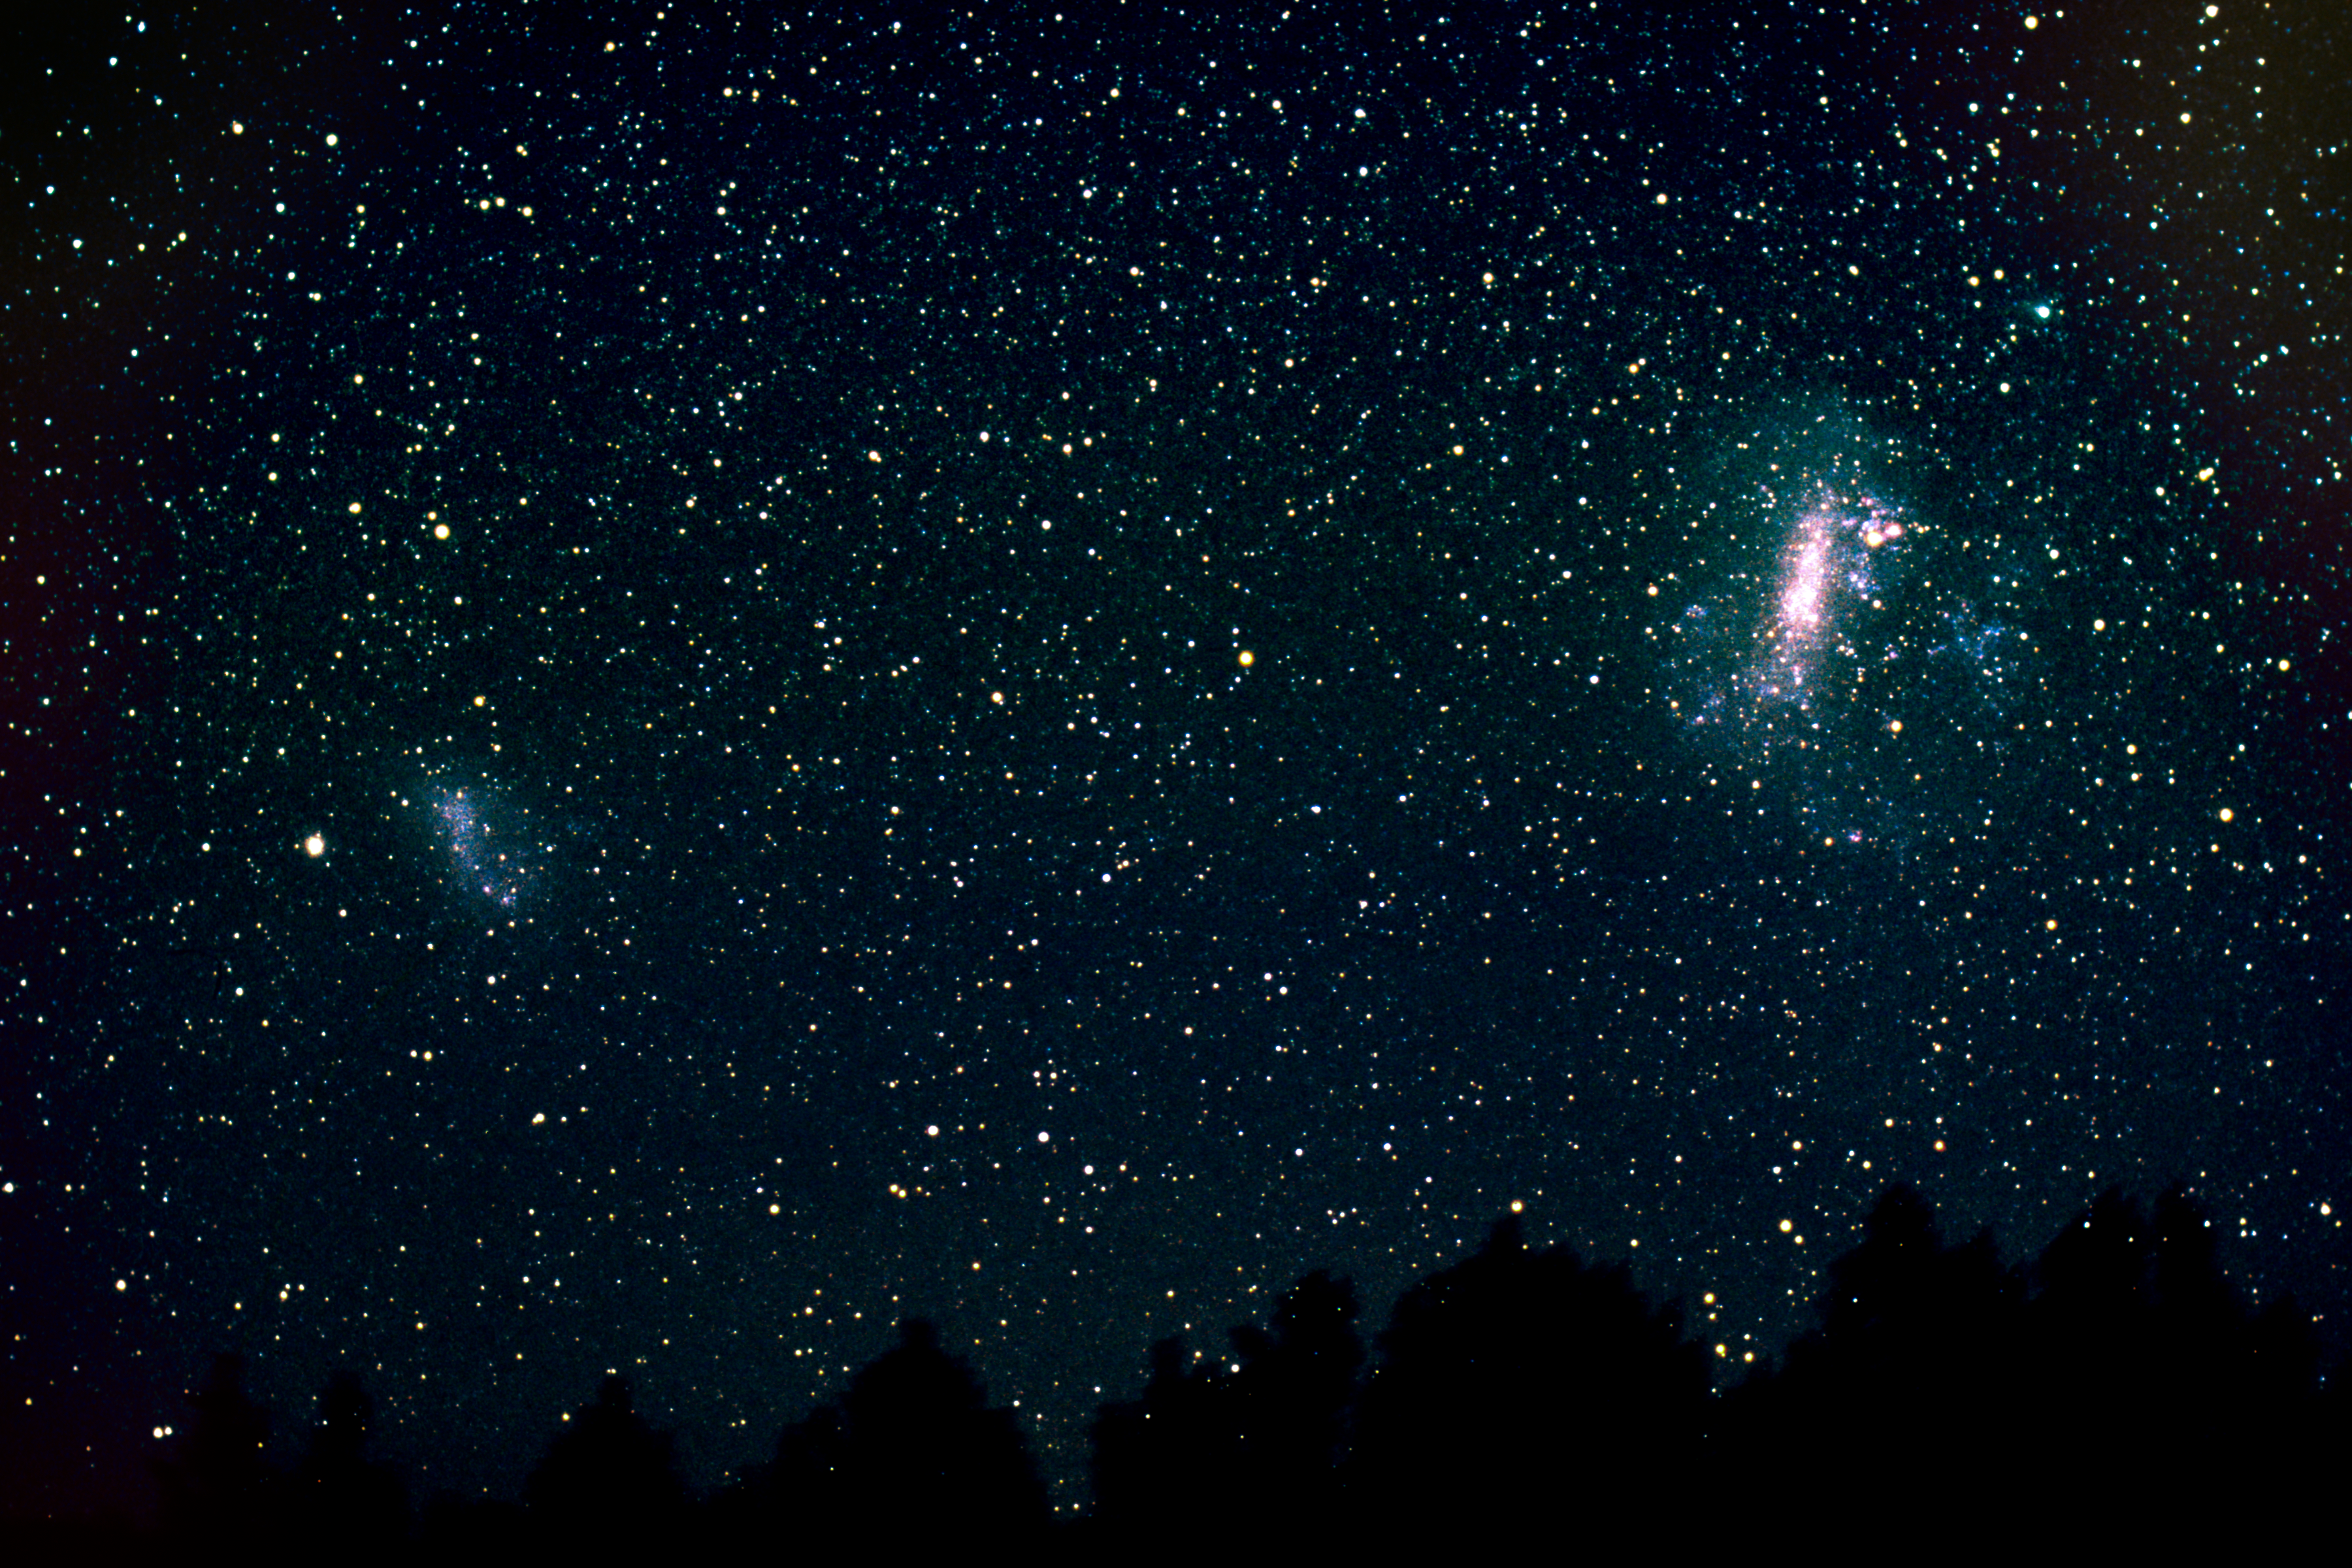

Wide-field image of Magellanic clouds (ground-based image)

This ground-based image shows both the Small and the Large Magellanic Clouds — two satellite galaxies of the Milky Way. The Small Magellanic Cloud can be seen on the left, the Large Magellanic Cloud on the right.

This photo was taken by the Japanese astrophotographer Akira Fujii.

Credit: A. Fujii